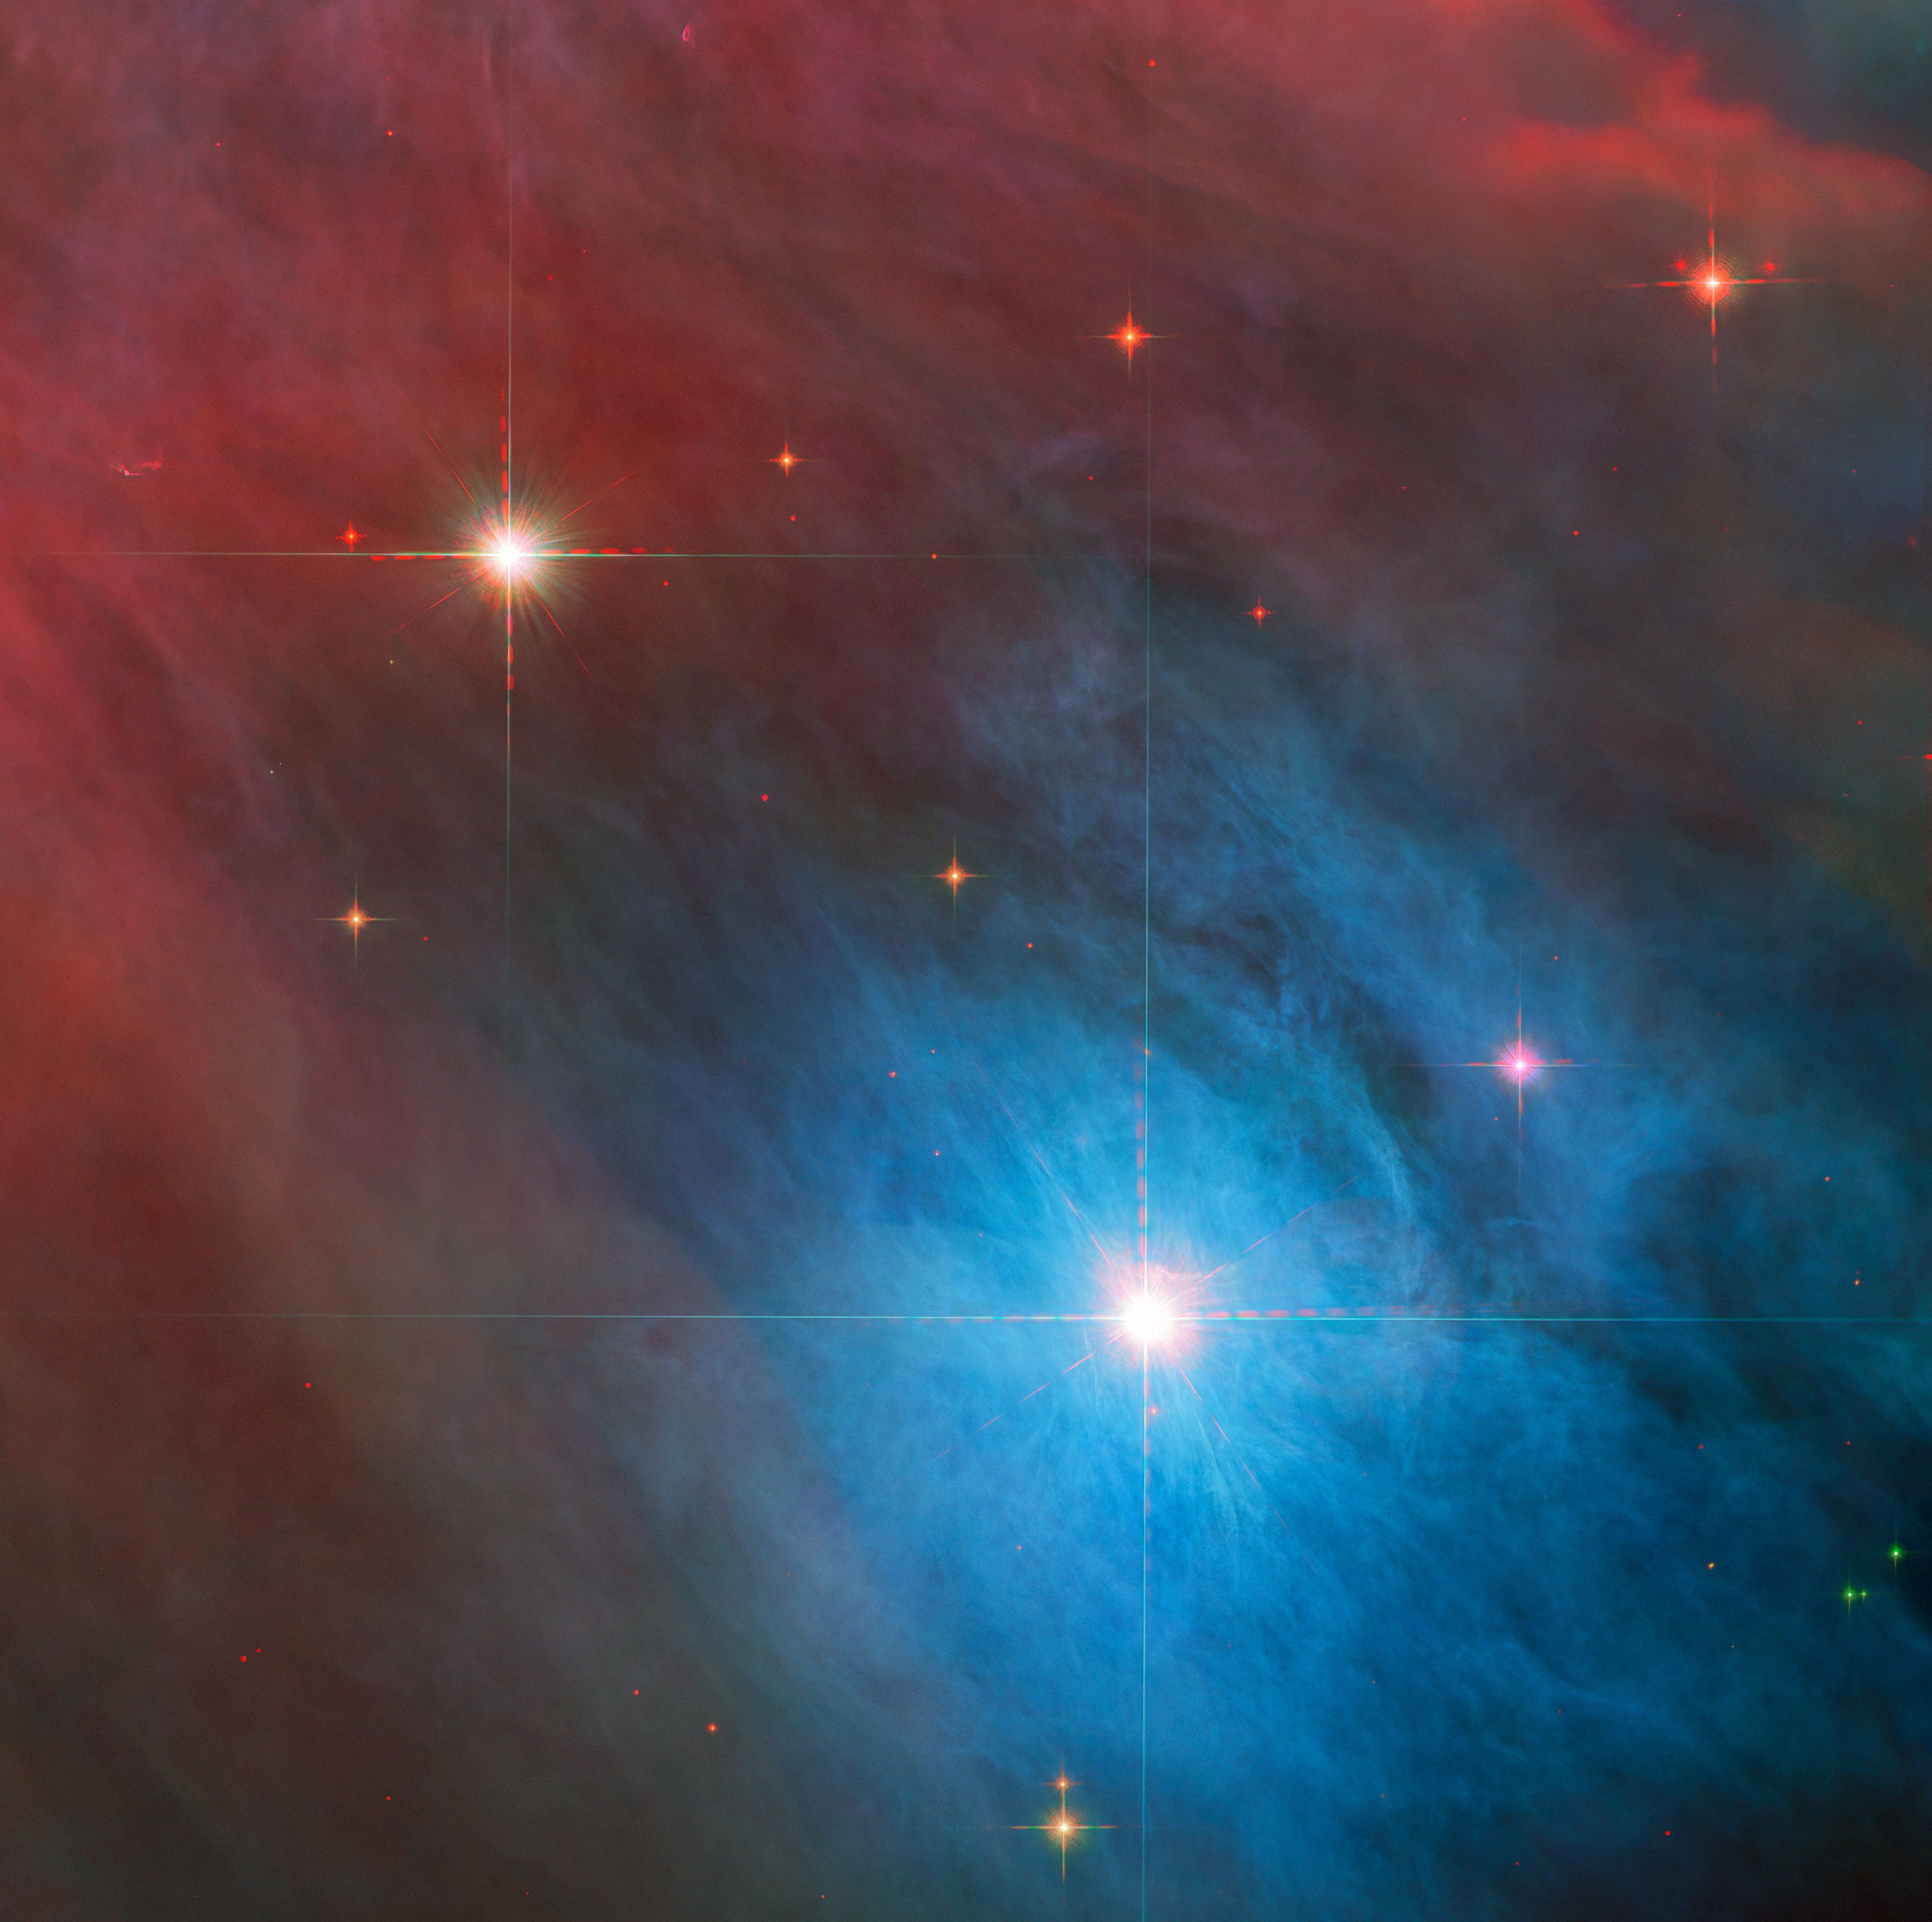

Tempestuous Young Stars in Orion

The bright variable star V 372 Orionis takes centre stage in this image from the NASA/ESA Hubble Space Telescope, which has also captured a smaller companion star in the upper left of this image. Both stars lie in the Orion Nebula, a colossal region of star formation roughly 1450 light years from Earth.

V 372 Orionis is a particular type of variable star known as an Orion Variable. These young stars experience some tempestuous moods and growing pains, which are visible to astronomers as irregular variations in luminosity. Orion Variables are often associated with diffuse nebulae, and V 372 Orionis is no exception; the patchy gas and dust of the Orion Nebula pervade this scene.

This image overlays data from two of Hubble’s instruments. Data from the Advanced Camera for Surveys and Wide Field Camera 3 at infrared and visible wavelengths were layered to reveal rich details of this corner of the Orion Nebula. Hubble also left its own subtle signature on this astronomical portrait in the form of the diffraction spikes surrounding the bright stars. These prominent artefacts are created by starlight interacting with Hubble’s inner workings, and as a result they reveal hints of Hubble’s structure. The four spikes surrounding the stars in this image are created by four vanes inside Hubble supporting the telescope’s secondary mirror. The diffraction spikes of the NASA/ESA/CSA James Webb Space Telescope, on the other hand, are six-pointed as a result of Webb’s hexagonal mirror segments and 3-legged support structure for the secondary mirror.

Credit: ESA/Hubble & NASA, J. Bally, M. Robberto